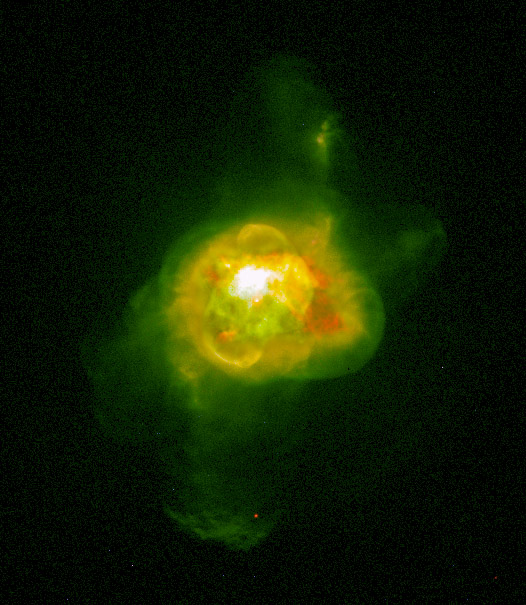

Planetary Nebula NGC 6210

A combination of two composite images of NGC 6210. The outer, mostly green portion represents the light of doubly ionized oxygen. The inner portion represents the light of singly and doubly ionized oxygen in red and green respectively.

Credit: Robert Rubin and Christopher Ortiz (NASA/ESA Ames Research Center), Patrick Harrington and Nancy Jo Lame (University of Maryland), Reginald Dufour (Rice University), and NASA/ESA